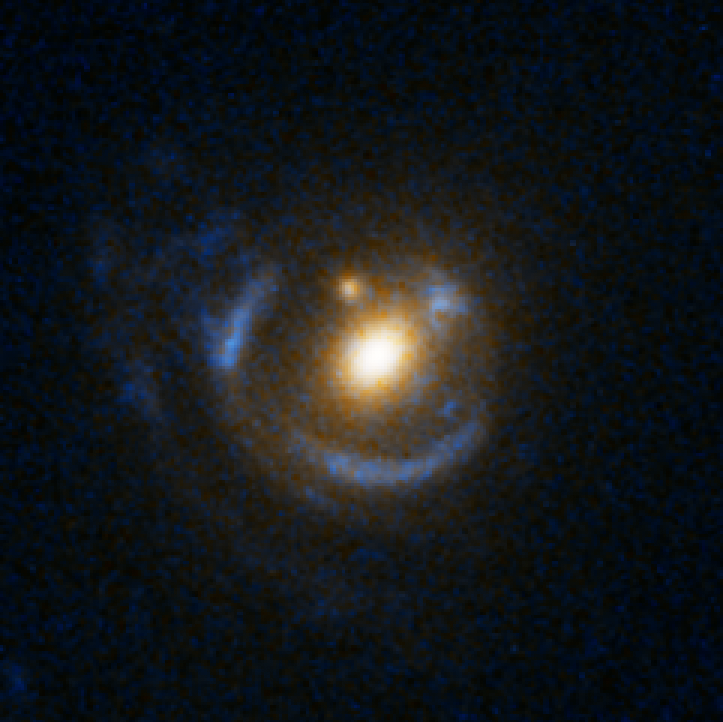

Einstein Ring Gravitational Lens: SDSS J095629.77+510006.6

This object is named SDSS J095629.77+510006.6. It is one of eight similar objects found by combining two powerful astronomical assets, the Sloan Digital Sky Survey (SDSS) and NASA's Hubble Space Telescope.
The objects are know as ‘Eienstein rings’ and are perhaps the most elegant manifestations of the gravitational lensing phenomina. Gravitational lensing occurs when the gravitational field from a massive object warps space and deflects light from a distant object behind it, allowing the distant object to be seen. Einstein rings are produced when two galaxies are almost perfectly aligned, one behind the other, giving an image like this with a reddish-white elliptical galaxy in the foreground and a thin ring of blue surrounding it — which is in fact the distorted light from another galaxy twice as far away.

Credit: NASA, ESA, A. Bolton (Harvard-Smithsonian CfA) and the SLACS Team